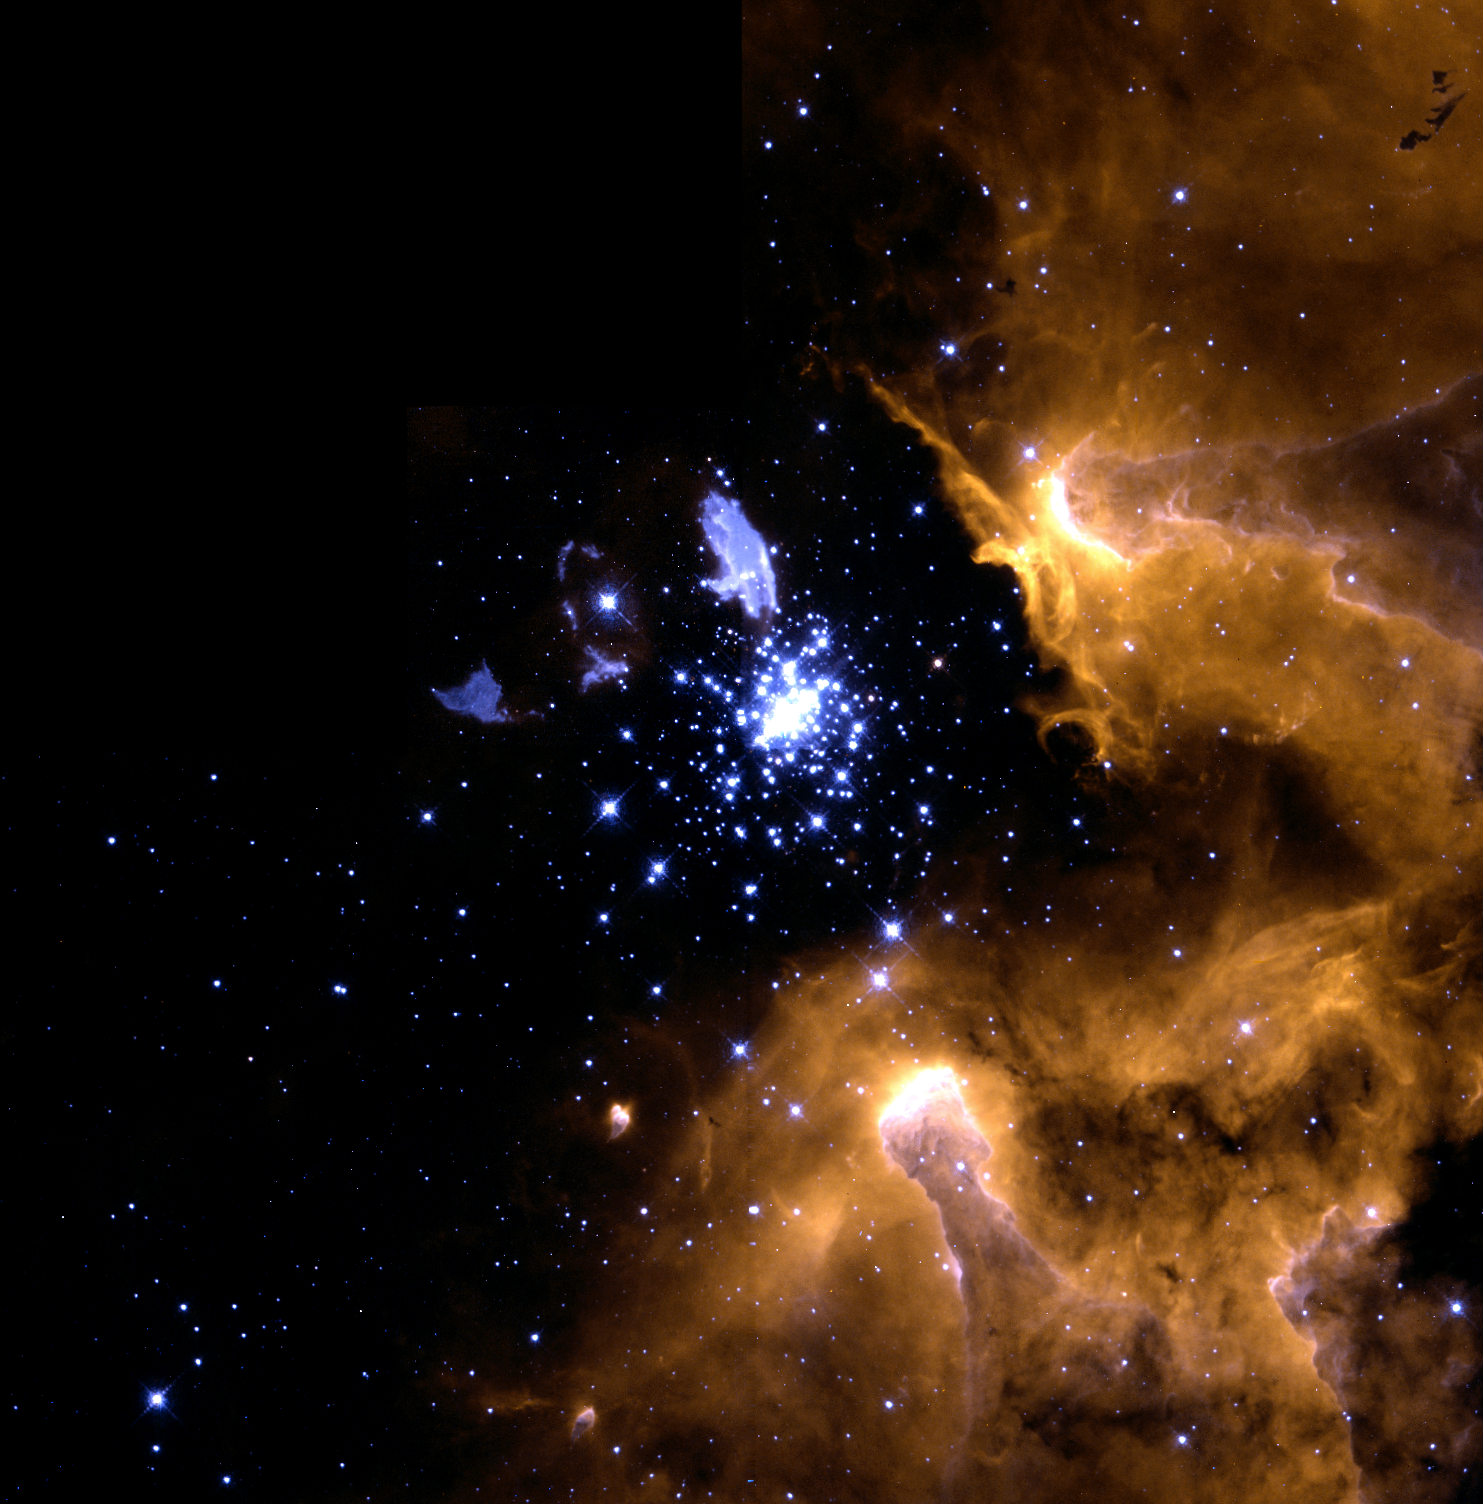

Hubble snapshot captures life cycle of stars

In this stunning picture of the giant galactic nebula NGC 3603, the crisp resolution of the NASA/ESA Hubble Space Telescope captures various stages of the life cycle of stars in one single view.

Credit: Wolfgang Brandner (JPL/IPAC), Eva K. Grebel (Univ. Washington), You-Hua Chu (Univ. Illinois Urbana-Champaign), and NASA/ESA